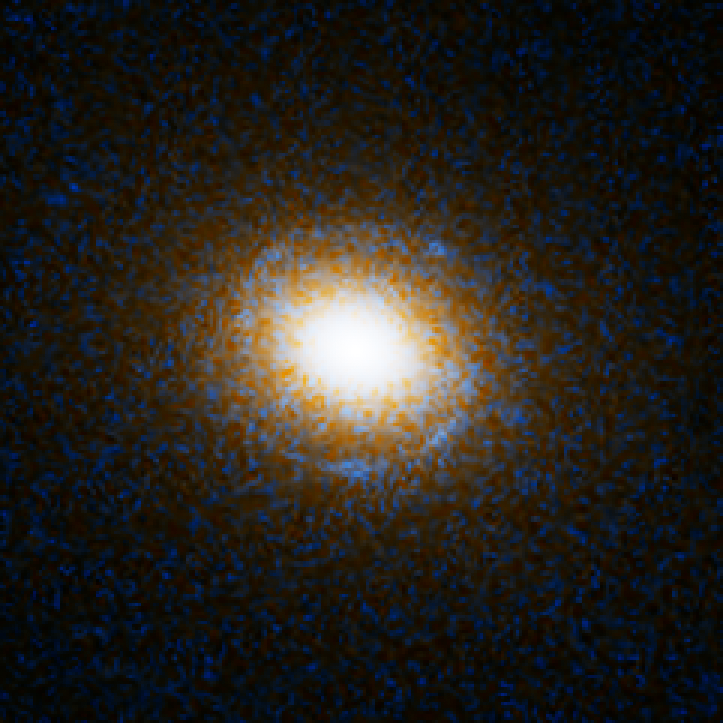

Einstein Ring Gravitational Lens: SDSS J140228.21+632133.5

This object is named SDSS J140228.21+632133.5. It is one of eight similar objects found by combining two powerful astronomical assets, the Sloan Digital Sky Survey (SDSS) and NASA's Hubble Space Telescope.

The objects are know as ‘Eienstein rings’ and are perhaps the most elegant manifestations of the gravitational lensing phenomina. Gravitational lensing occurs when the gravitational field from a massive object warps space and deflects light from a distant object behind it, allowing the distant object to be seen. Einstein rings are produced when two galaxies are almost perfectly aligned, one behind the other, giving an image like this with a reddish-white elliptical galaxy in the foreground and a thin ring of blue surrounding it — which is in fact the distorted light from another galaxy twice as far away.

Credit: NASA, ESA, A. Bolton (Harvard-Smithsonian CfA) and the SLACS Team